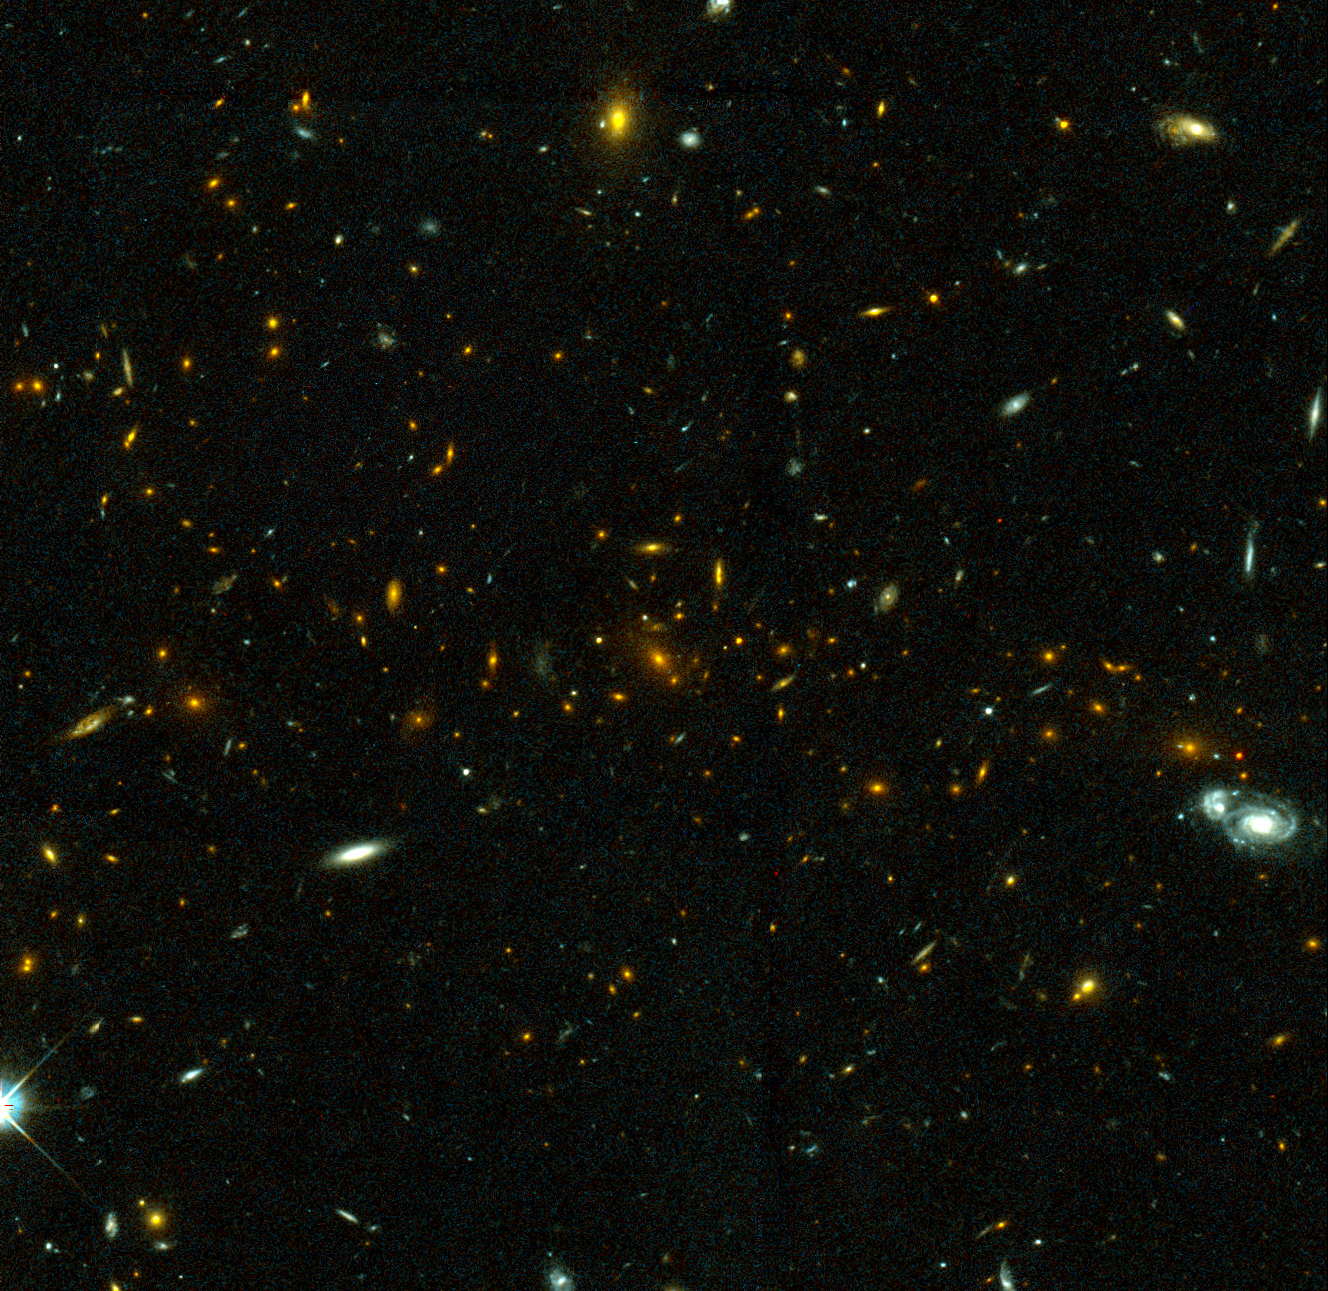

Galaxy Cluster MS1054-03

Exciting Hubble Space Telescope images of more than a dozen very distant colliding galaxies indicate that, at least in some cases, big massive galaxies form through collisions between smaller ones, in a 'generation after generation' never-ending story.

Credit: ESA/NASA, Pieter van Dokkum (University of Groningen/Leiden), Marijn Franx (University of Groningen/Leiden)